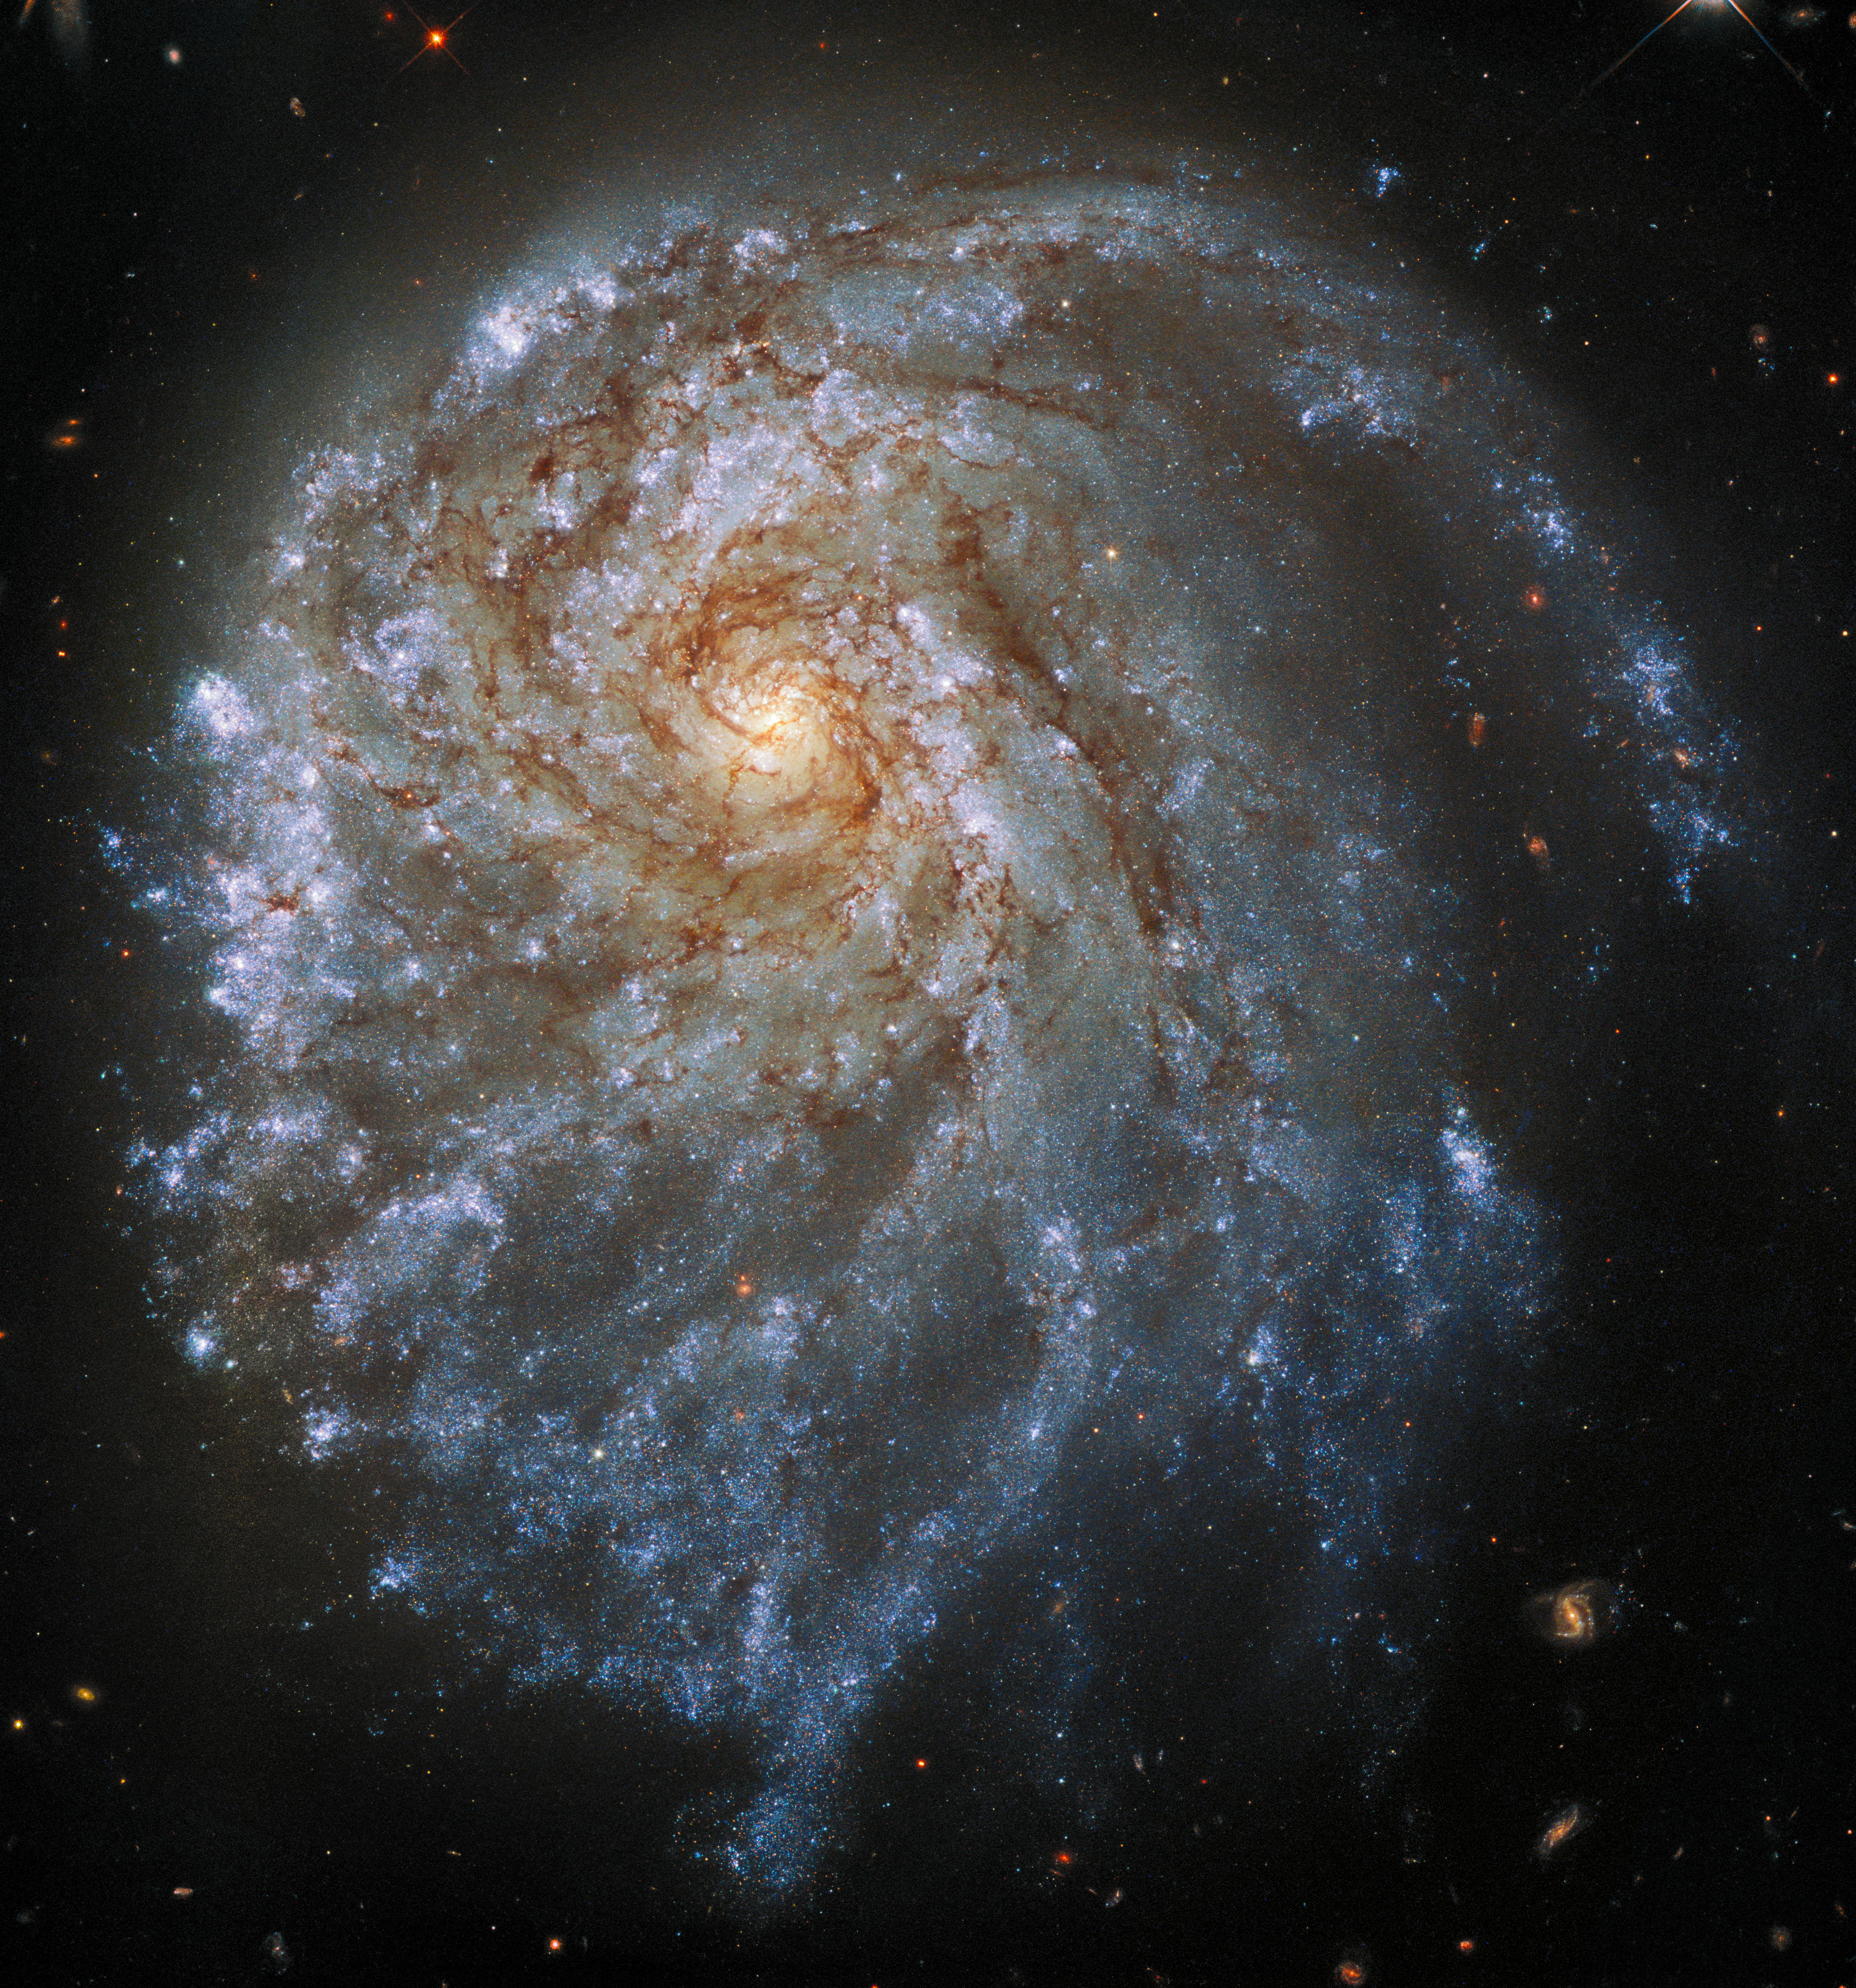

Hubble Captures NGC 2276

This spectacular image from the NASA/ESA Hubble Space Telescope shows the trailing arms of NGC 2276, a spiral galaxy 120 million light-years away in the constellation of Cepheus. At first glance, the delicate tracery of bright spiral arms and dark dust lanes resembles countless other spiral galaxies. A closer look reveals a strangely lopsided galaxy shaped by gravitational interaction and intense star formation.

Credit: ESA/Hubble & NASA, P. Sell Acknowledgement: L. Shatz